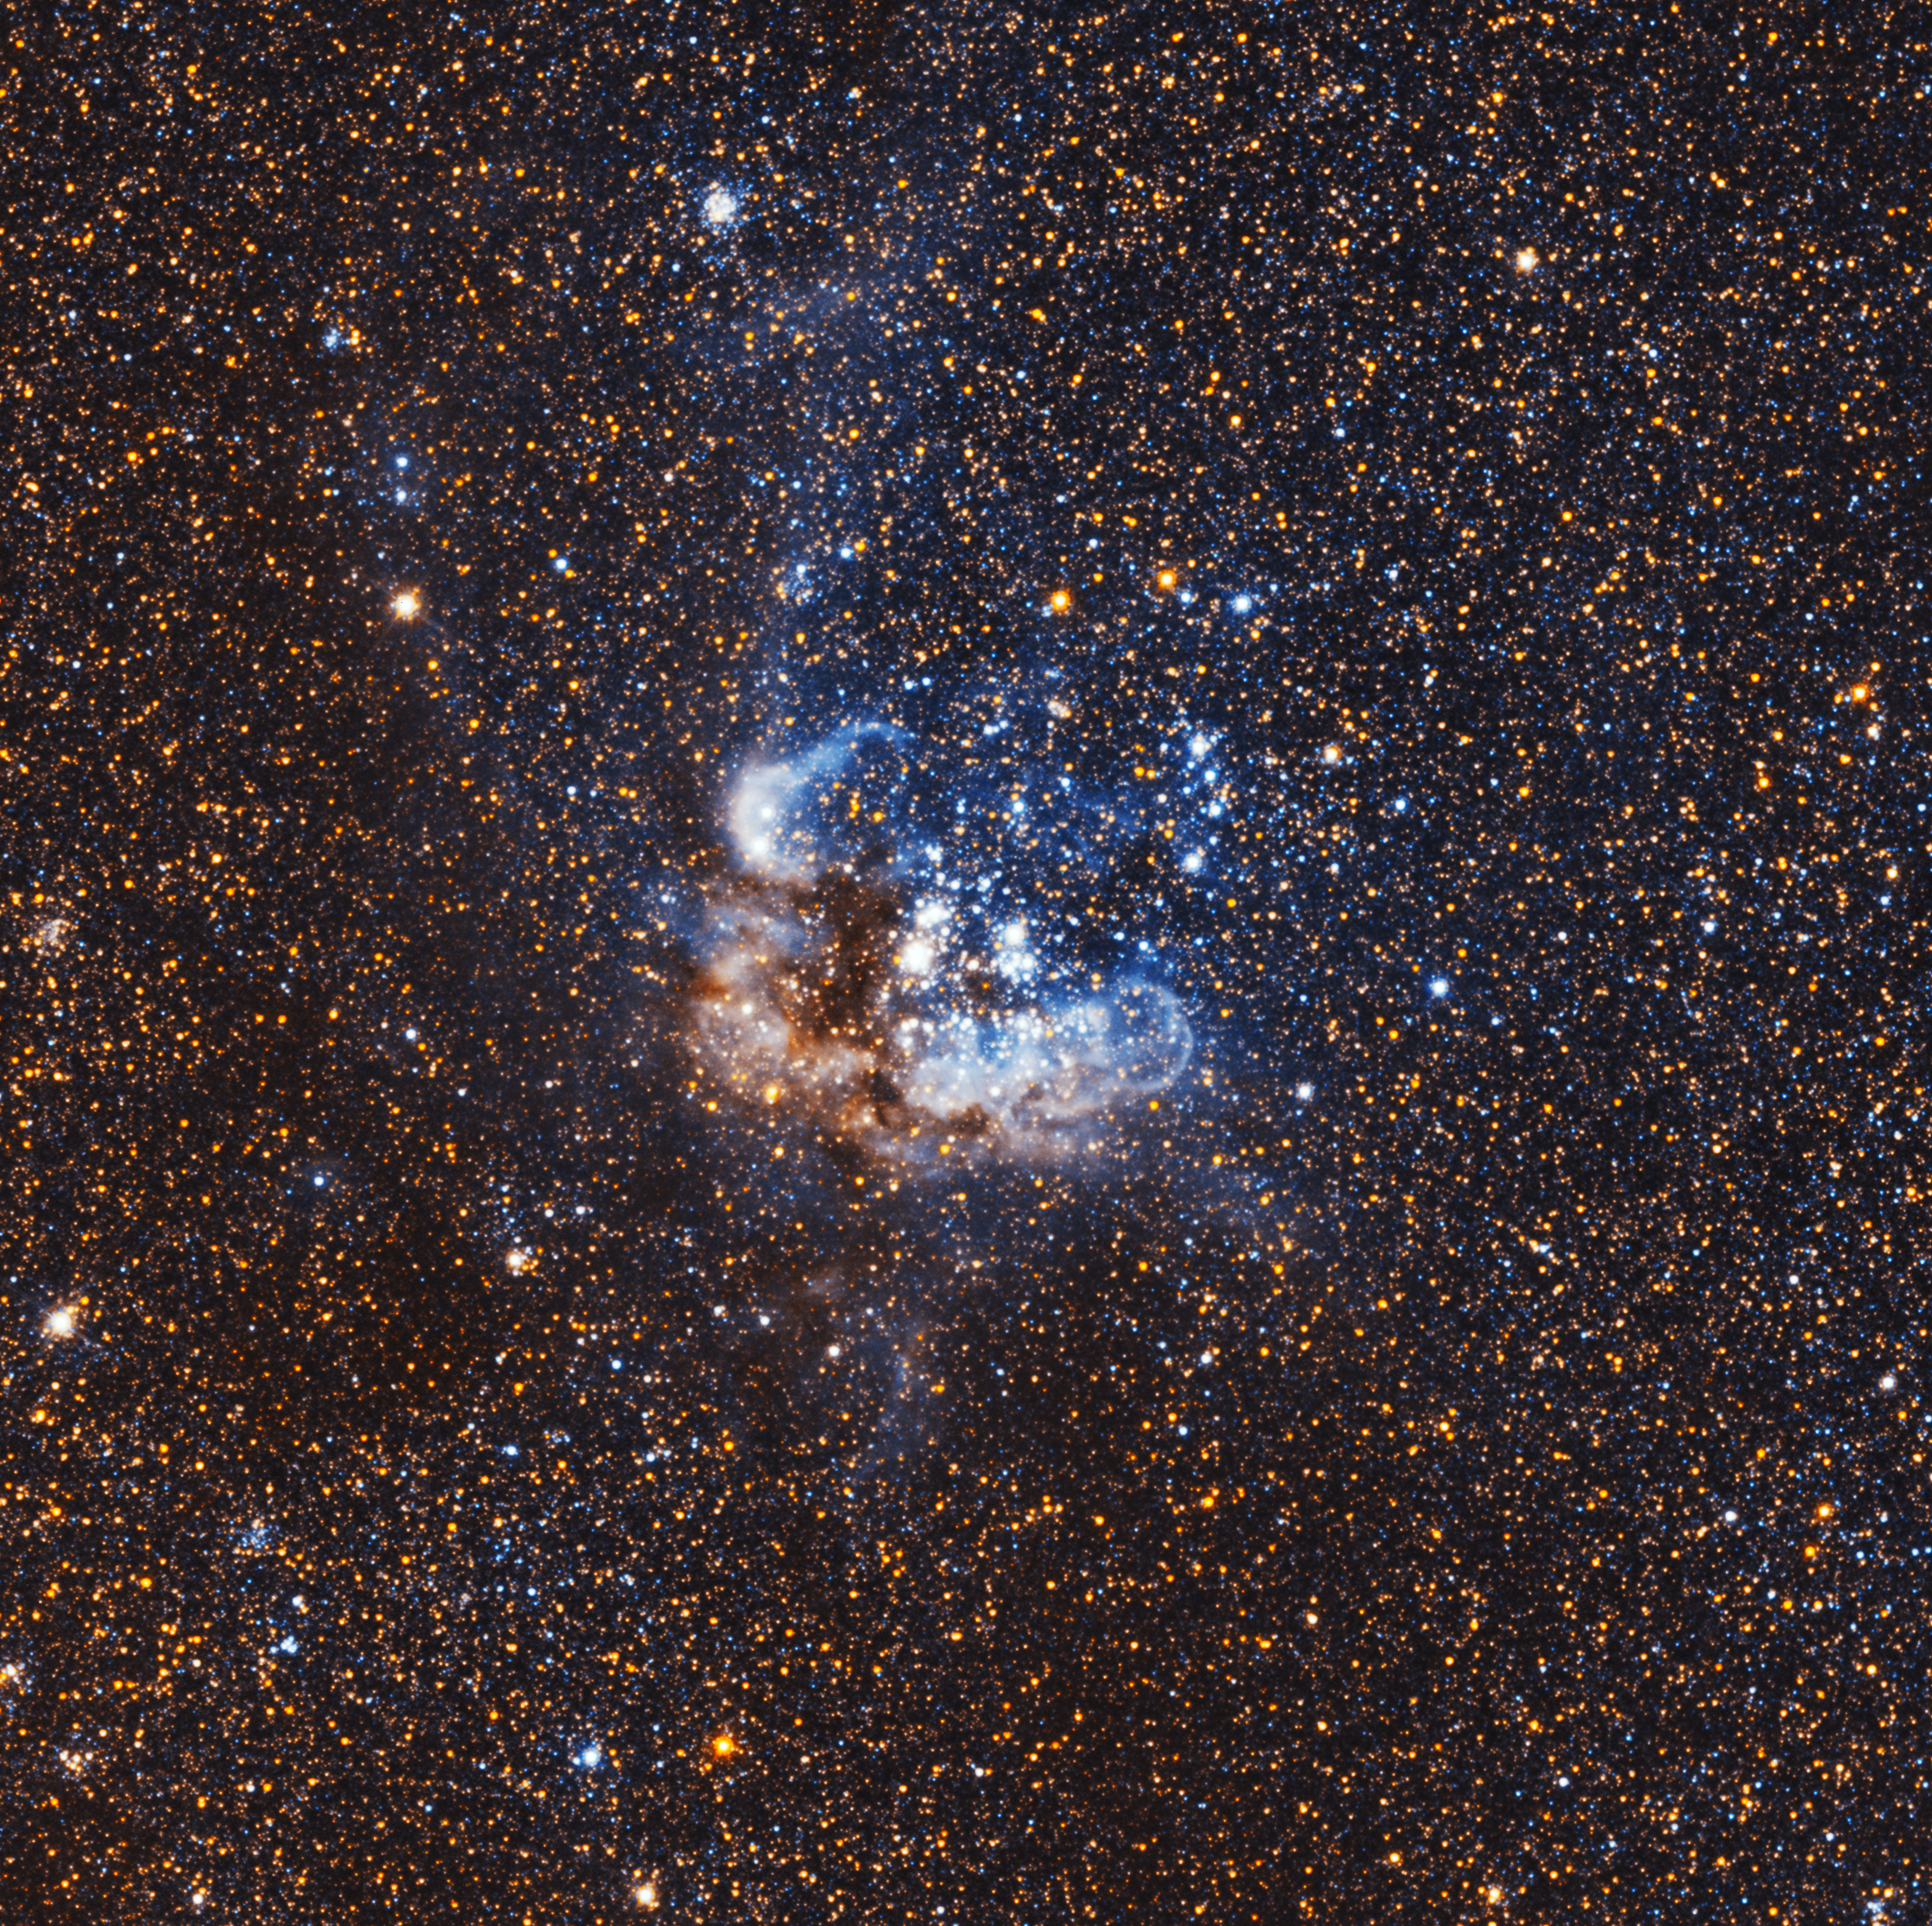

NGC 595 — a diffuse nebula in the Triangulum Galaxy

NGC 595 is is a gigantic region of ionised hydrogen in the Triangulum Galaxy, about three million light-years away.

The nebula was discovered by the German astronomer Heinrich Ludwig d'Arrest on 1 October 1864.

This image is only a tiny part of the large wide-field image of the Triangulum Galaxy created by the NASA/ESA Hubble Space Telescope.

Credit: NASA, ESA, and M. Durbin, J. Dalcanton, and B. F. Williams (University of Washington)